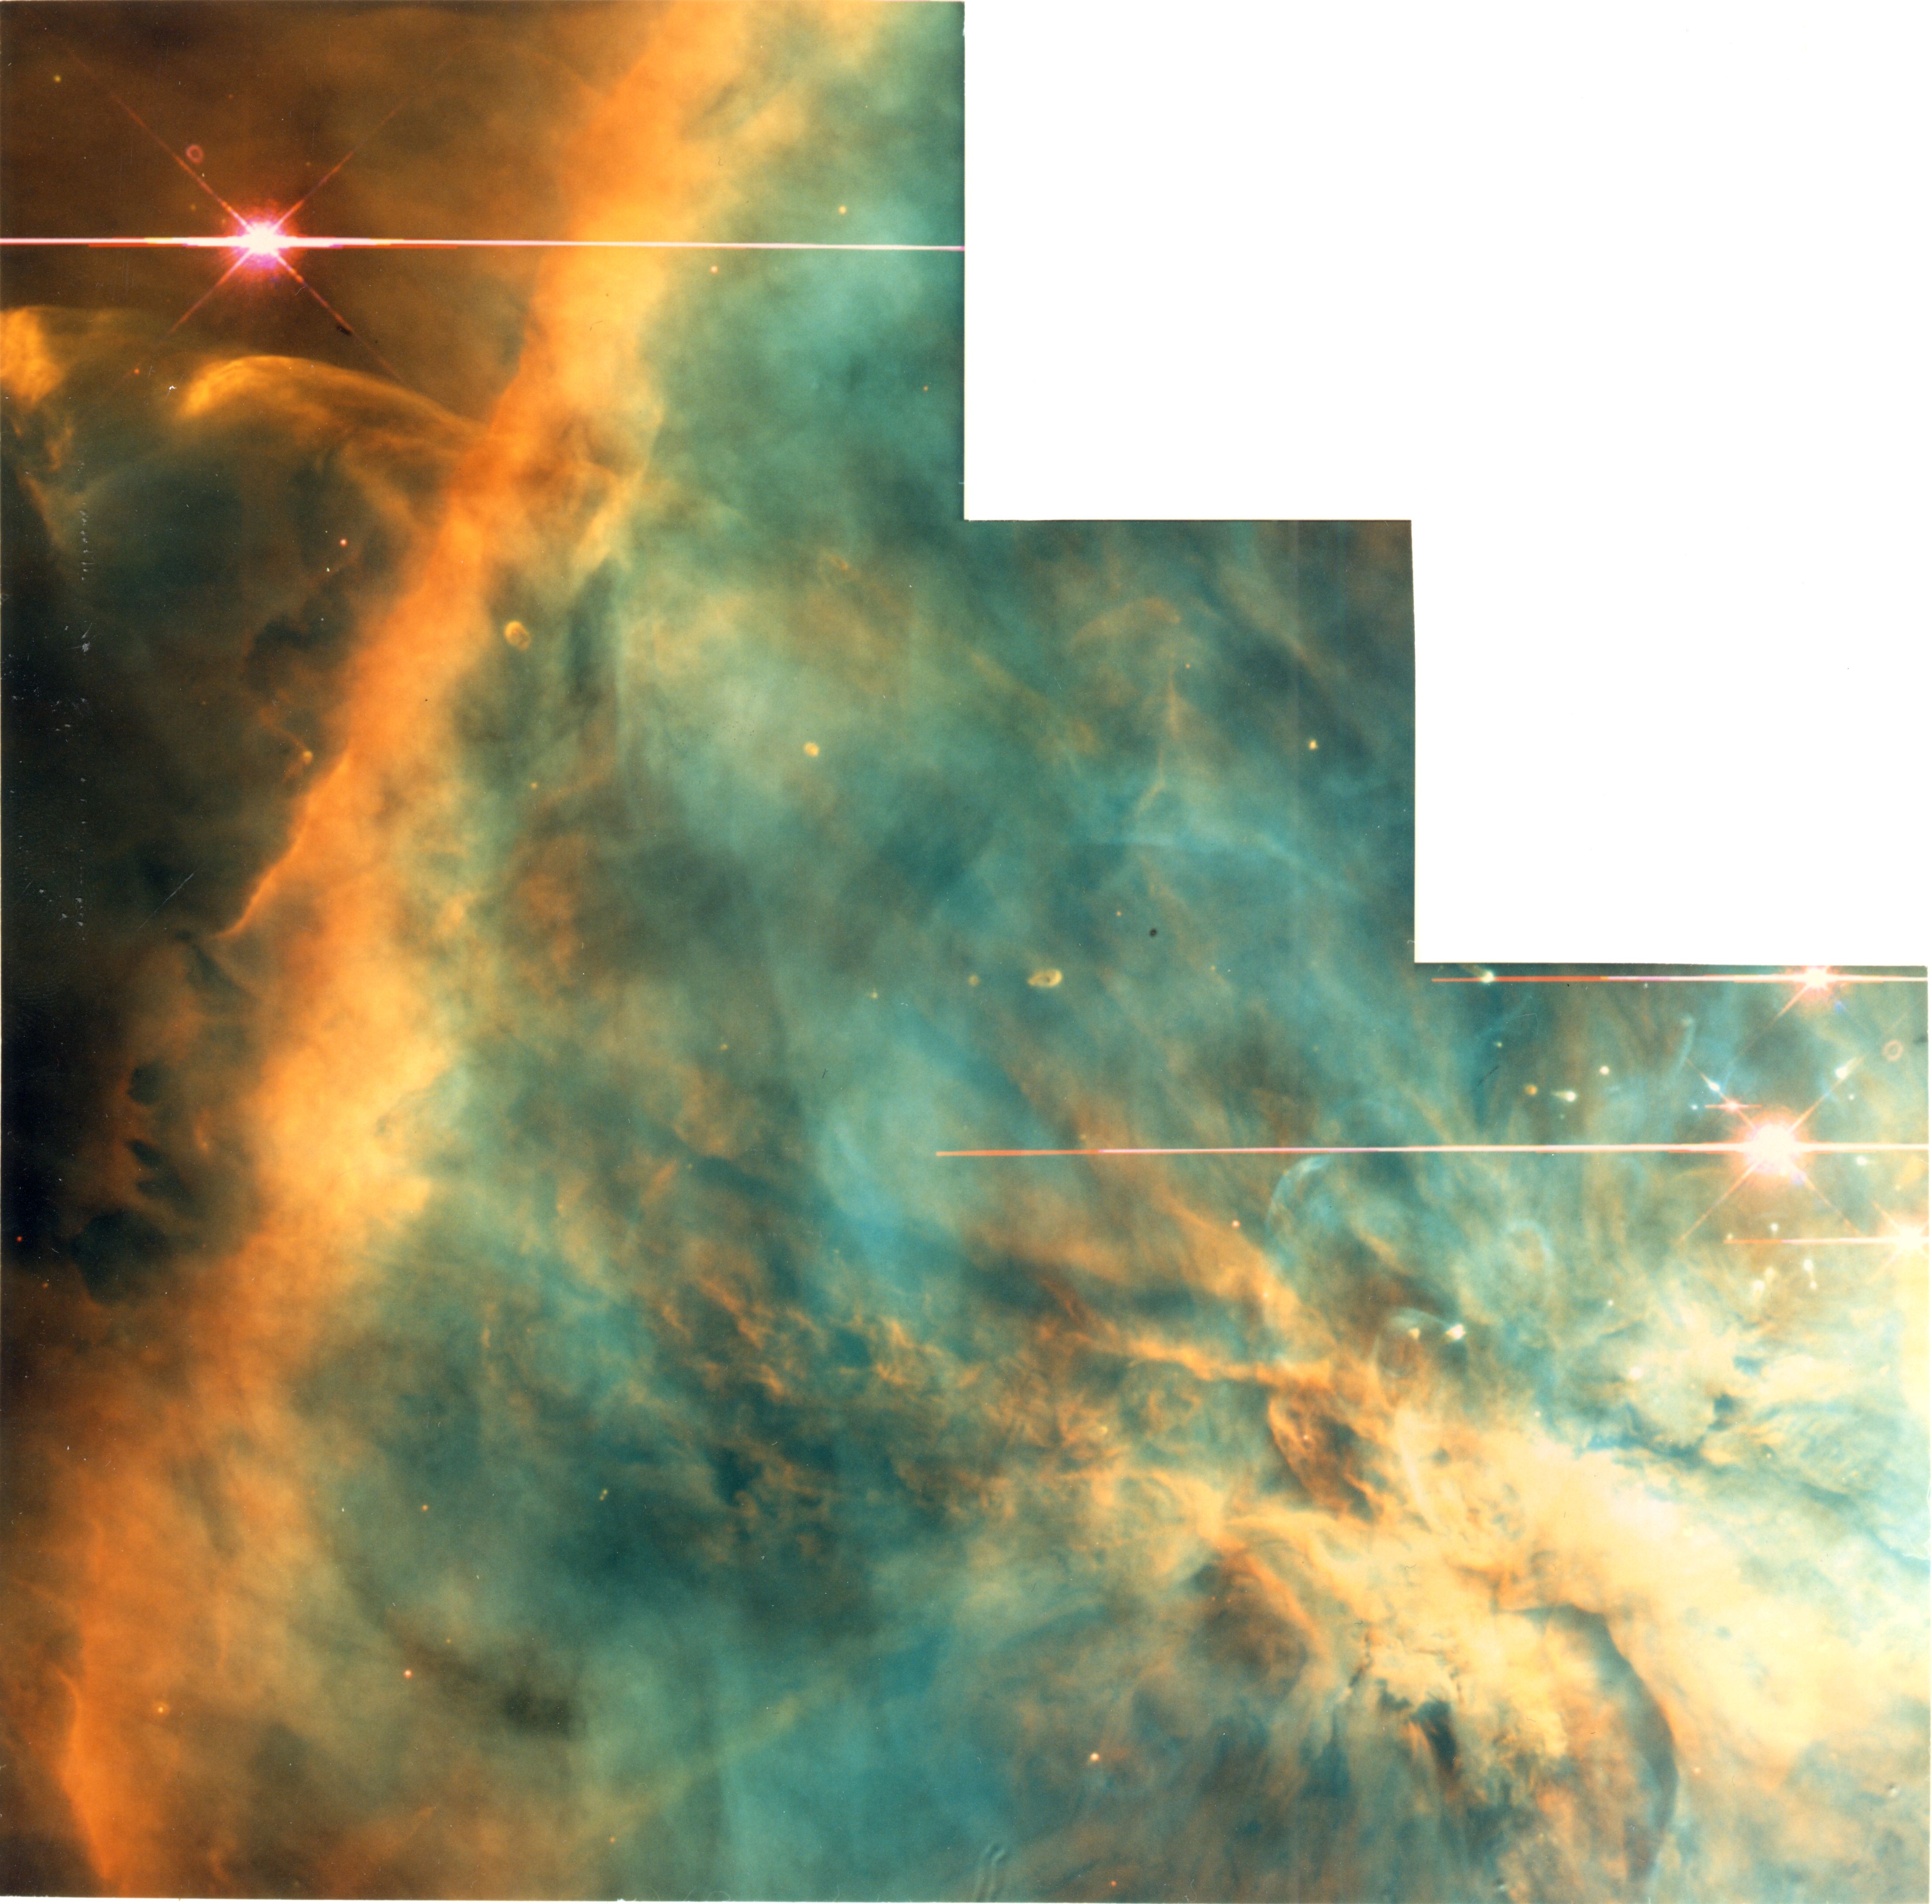

Hubble Probes the Great Orion Nebula

A NASA/ESA Hubble Space Telescope image of a region of the Great Nebula in Orion, as imaged by the Wale Field Planetary Camera 2.

This is one of the nearest regions of very recent star formation (300,000 years ago). The nebula is a giant gas cloud illuminated by the brightest of the young hot stars at the top of the picture. Many of the fainter young stars are surrounded by disks of dust and gas, that are slightly more than twice the diameter of the solar system (or 100 Astronomical Units in diameter).

Credit: C.R. O'Dell/ Rice University NASA/ESA